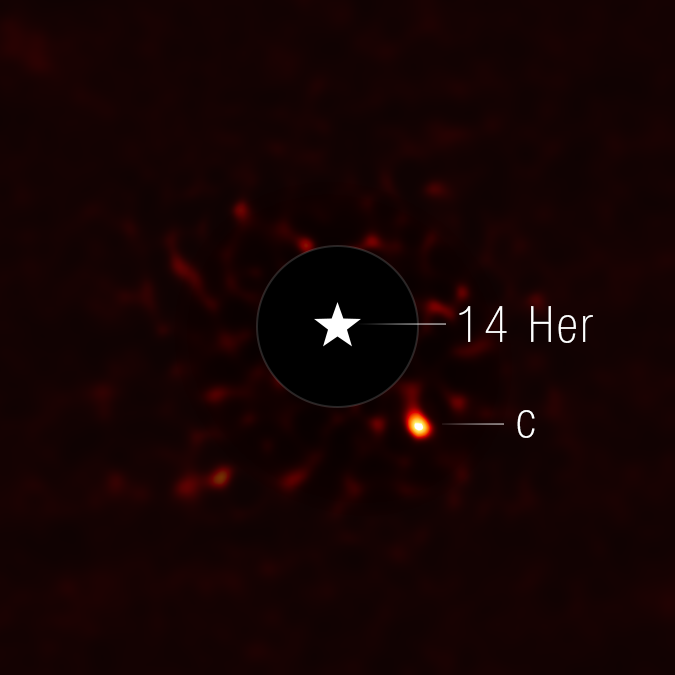

14 Herculis c

This image of 14 Herculis c, a planet orbiting a star 60 light-years away from Earth, was taken with the coronagraph on the NASA/ESA/CSA James Webb Space Telescope’s NIRCam (Near-Infrared Camera). A star symbol marks the location of the host star 14 Herculis, whose light has been blocked by the coronagraph (shown here as a dark circle outlined in white).

Observations from Webb suggest the exoplanet, 14 Herculis c, is as cool as -3 degrees Celsius, marking it as one of the coldest exoplanets ever imaged. Findings also indicate the planet orbits around 2.25 billion kilometres from the host star in a highly elliptical orbit, closer in than previous estimates. The planet was not as bright as researchers expected based on its known age (around 4 billion years old) or mass (about 7 times the planet Jupiter). This leads researchers to believe there are complex atmospheric dynamics at play where molecules made at warmer temperatures in the lower atmosphere are brought to the cold, upper atmosphere very quickly.

Light at 4.44 microns was assigned to the color red in this image.

Credit: NASA, ESA, CSA, STScI, W. Balmer (JHU), D. Bardalez Gagliuffi (Amherst College)